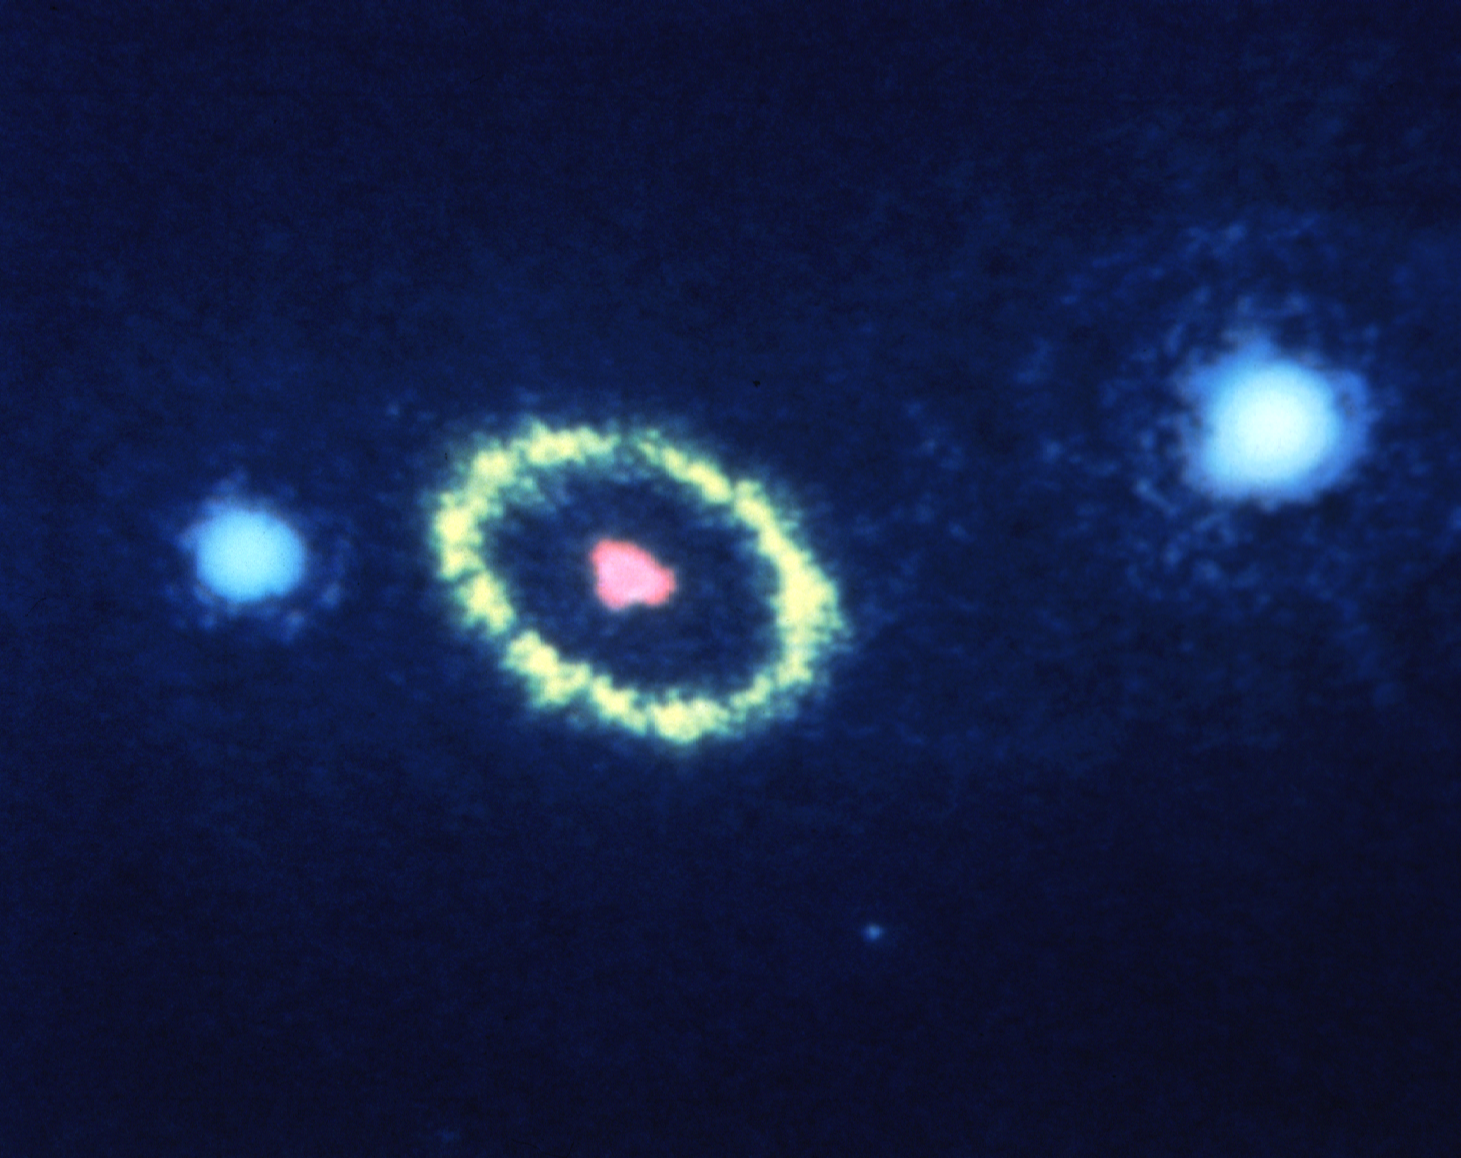

Hubble Space Telescope resolves gaseous ring around supernova

HST has resolved, to an unprecedented detail of 0.1 arc second, a mysterious elliptical ring of material around the remnants of Supernova 1987A.

In this image, taken with the European Space Agency's Faint Object Camera on August 23, 1990 the ring appears as a yellow ellipse. The tightly knotted debris from the stellar explosion appears as a red blob near the center of the ring. The blue stars to the left and right of the ring are not associated with the supernova.

Credit: NASA and ESA